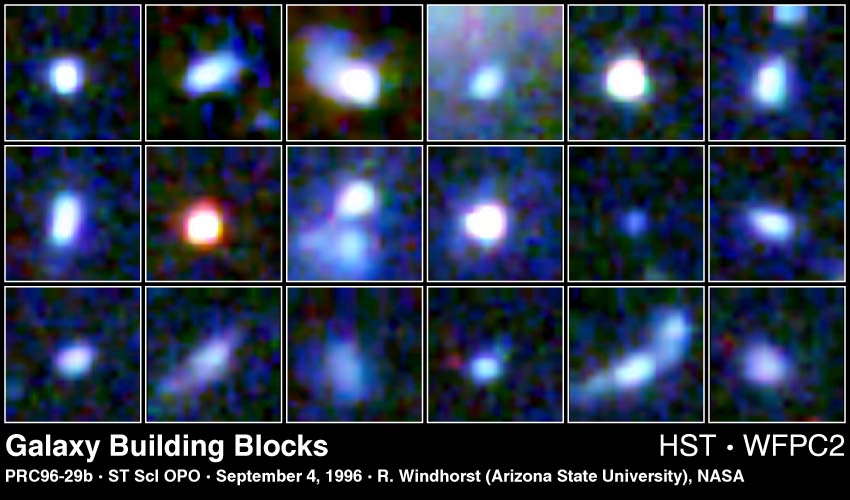

Galaxy Building Blocks

These 18 small blue objects - each 11 billion light-years from Earth - could be the seeds of some of today's galaxies. Each clump contains several billion stars. Astronomers believe that many of these objects have collided and merged with each other over time to grow into the giant and luminous galaxies seen around us today.

Credit: Rogier Windhorst and Sam Pascarelle (Arizona State University) and NASA/ESA